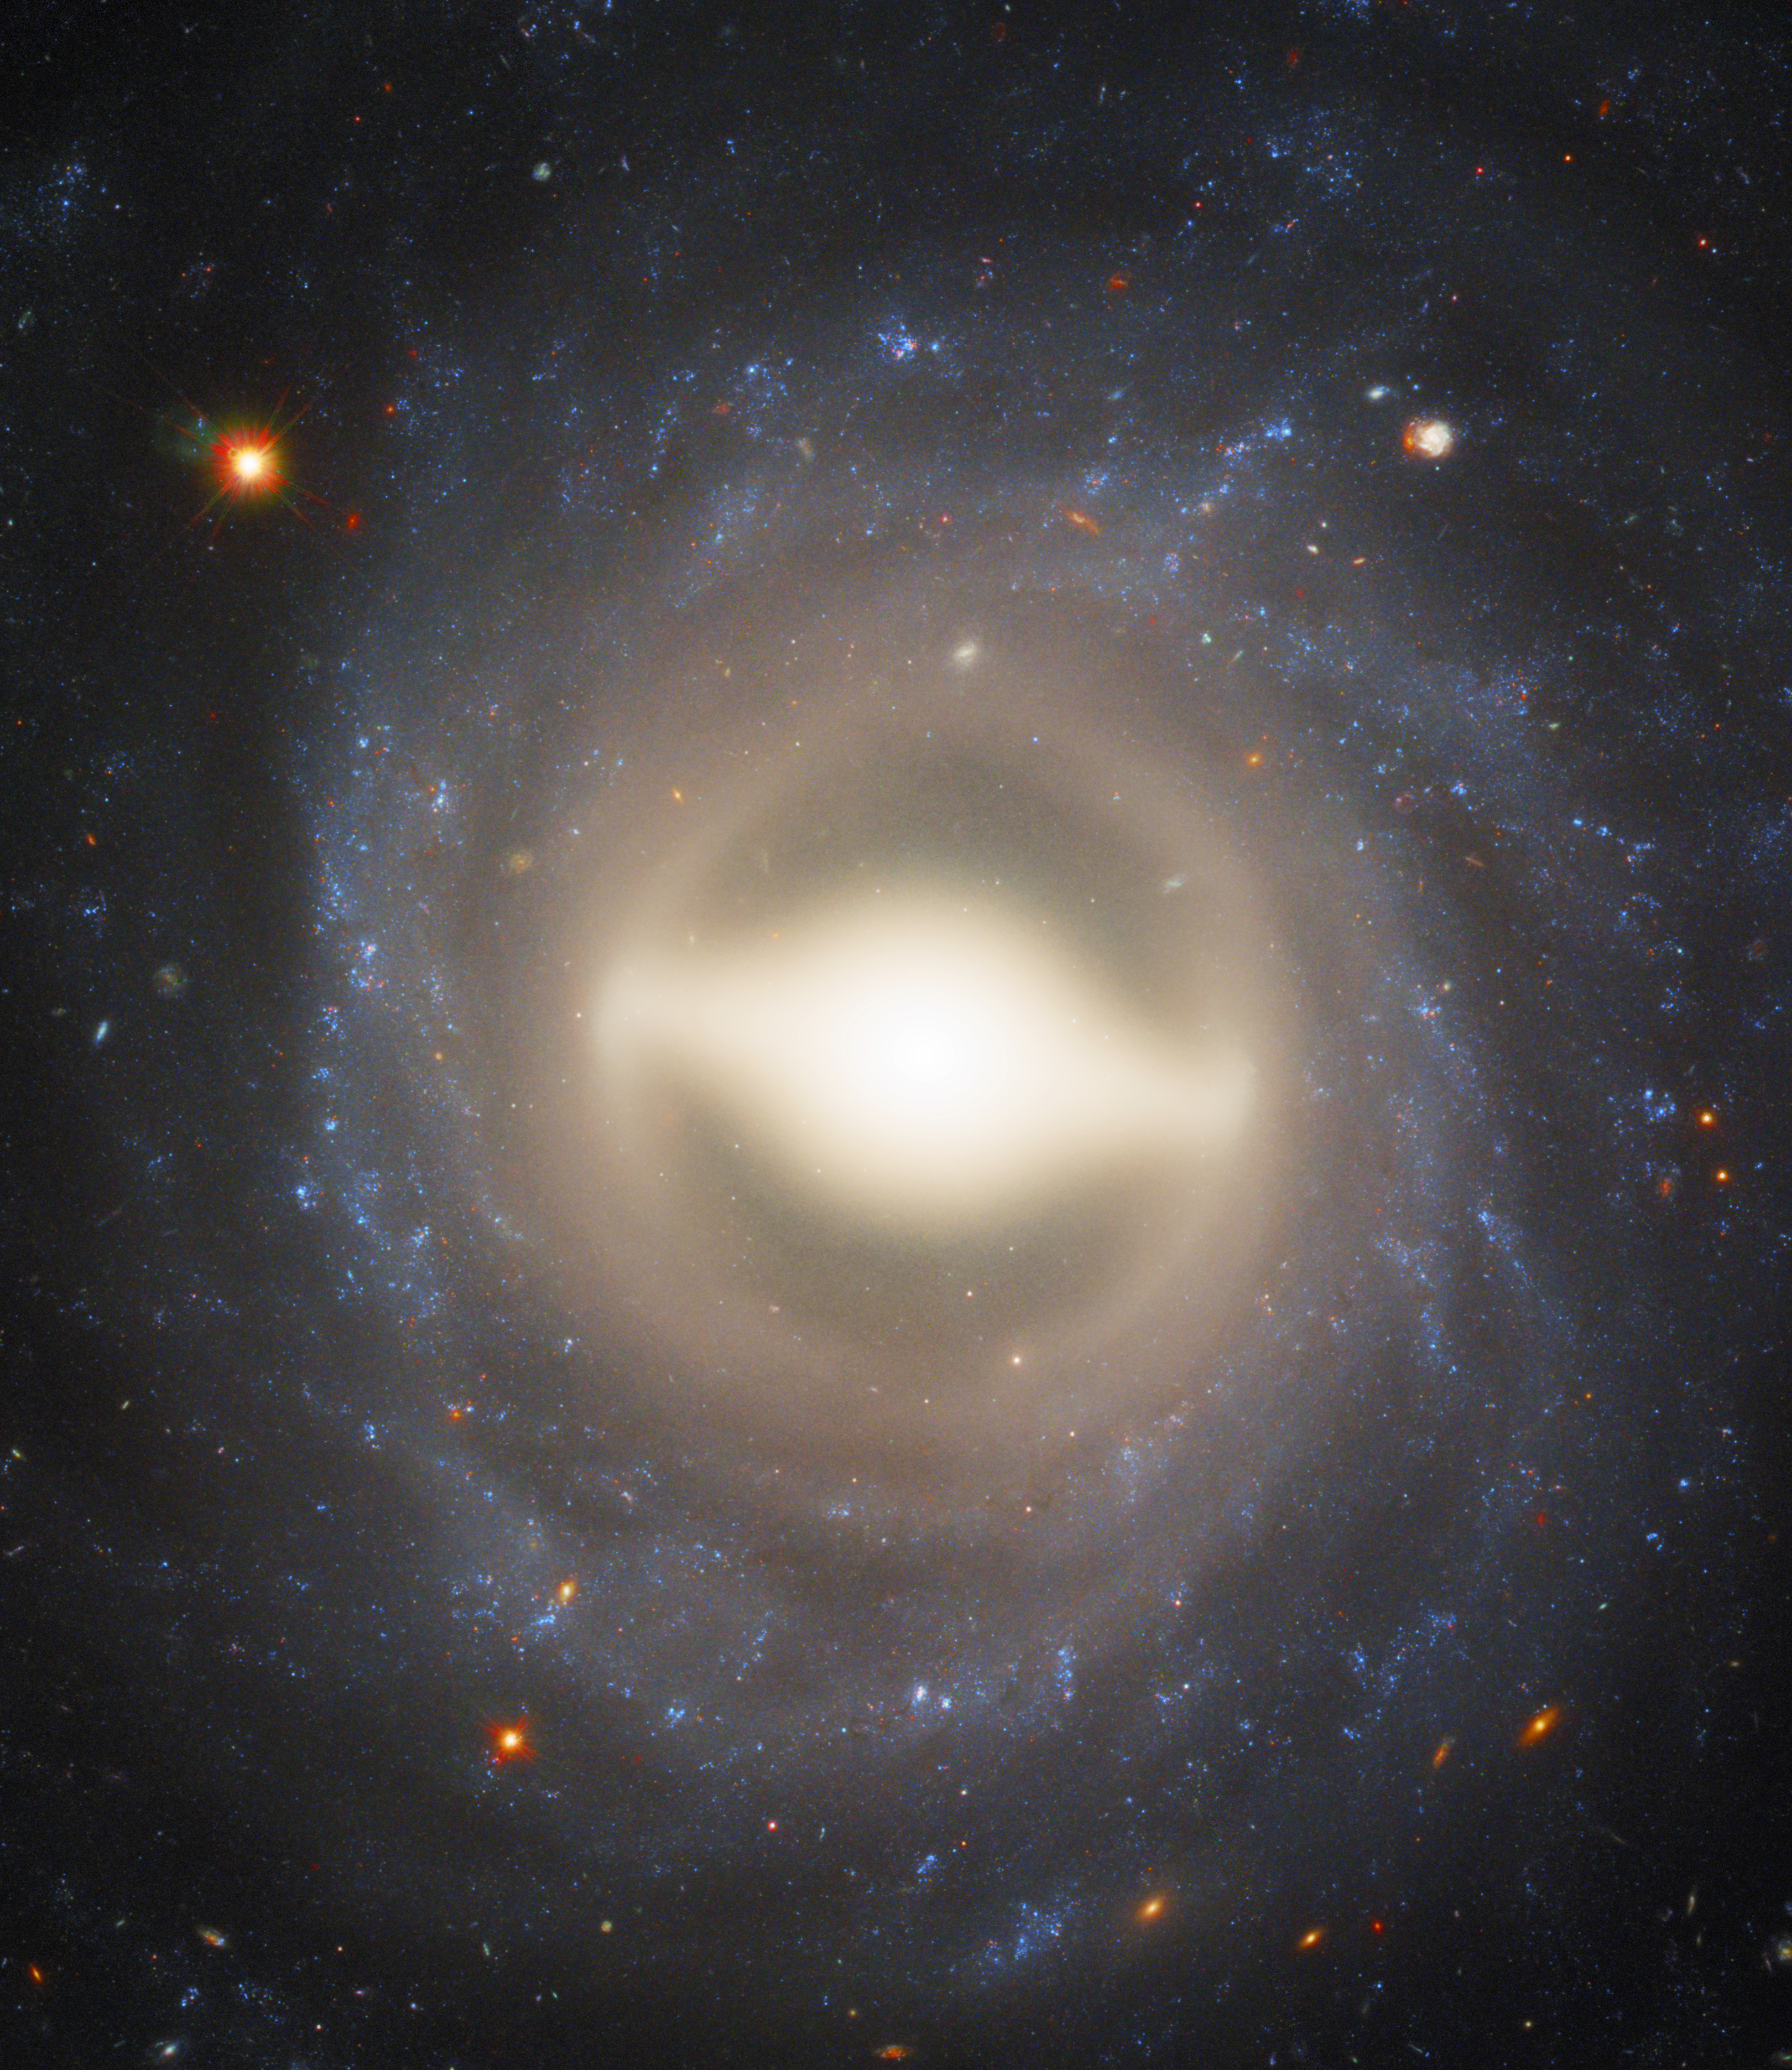

Spirals and supernovae

This stunning image from Hubble shows the majestic galaxy NGC 1015, found nestled within the constellation of Cetus (The Whale) 118 million light-years from Earth. In this image, we see NGC 1015 face-on, with its beautifully symmetrical swirling arms and bright central bulge creating a scene akin to a sparkling Catherine wheel firework.

NGC 1015 has a bright, fairly large centre and smooth, tightly wound spiral arms and a central “bar” of gas and stars. This shape leads NGC 1015 to be classified as a barred spiral galaxy — just like our home, the Milky Way. Bars are found in around two-thirds of all spiral galaxies, and the arms of this galaxy swirl outwards from a pale yellow ring encircling the bar itself. Scientists believe that any hungry black holes lurking at the centre of barred spirals funnel gas and energy from the outer arms into the core via these glowing bars, feeding the black hole, fueling star birth at the centre and building up the galaxy’s central bulge.

In 2009, a Type Ia supernova named SN 2009ig was spotted in NGC 1015 — one of the bright dots to the upper right of the galaxy’s centre. These types of supernovae are extremely important: they are all caused by exploding white dwarfs which have companion stars, and always peak at the same brightness — 5 billion times brighter than the Sun. Knowing the true brightness of these events, and comparing this with their apparent brightness, gives astronomers a unique chance to measure distances in the Universe.

Credit: ESA/Hubble & NASA, A. Riess (STScl/JHU)